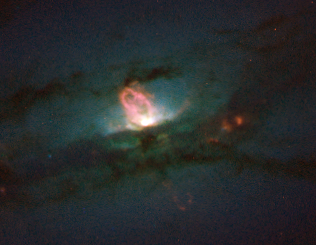

Active Galaxy NGC 4438

A monstrous black hole's rude table manners include blowing huge bubbles of hot gas into space. At least, that's the gustatory practice followed by the supermassive black hole residing in the hub of the nearby galaxy NGC 4438. Known as a peculiar galaxy because of its unusual shape, NGC 4438 is in the Virgo Cluster, 50 million light-years from Earth.

Credit: NASA/ESA, Jeffrey Kenney (Yale University), Elizabeth Yale (Yale University)